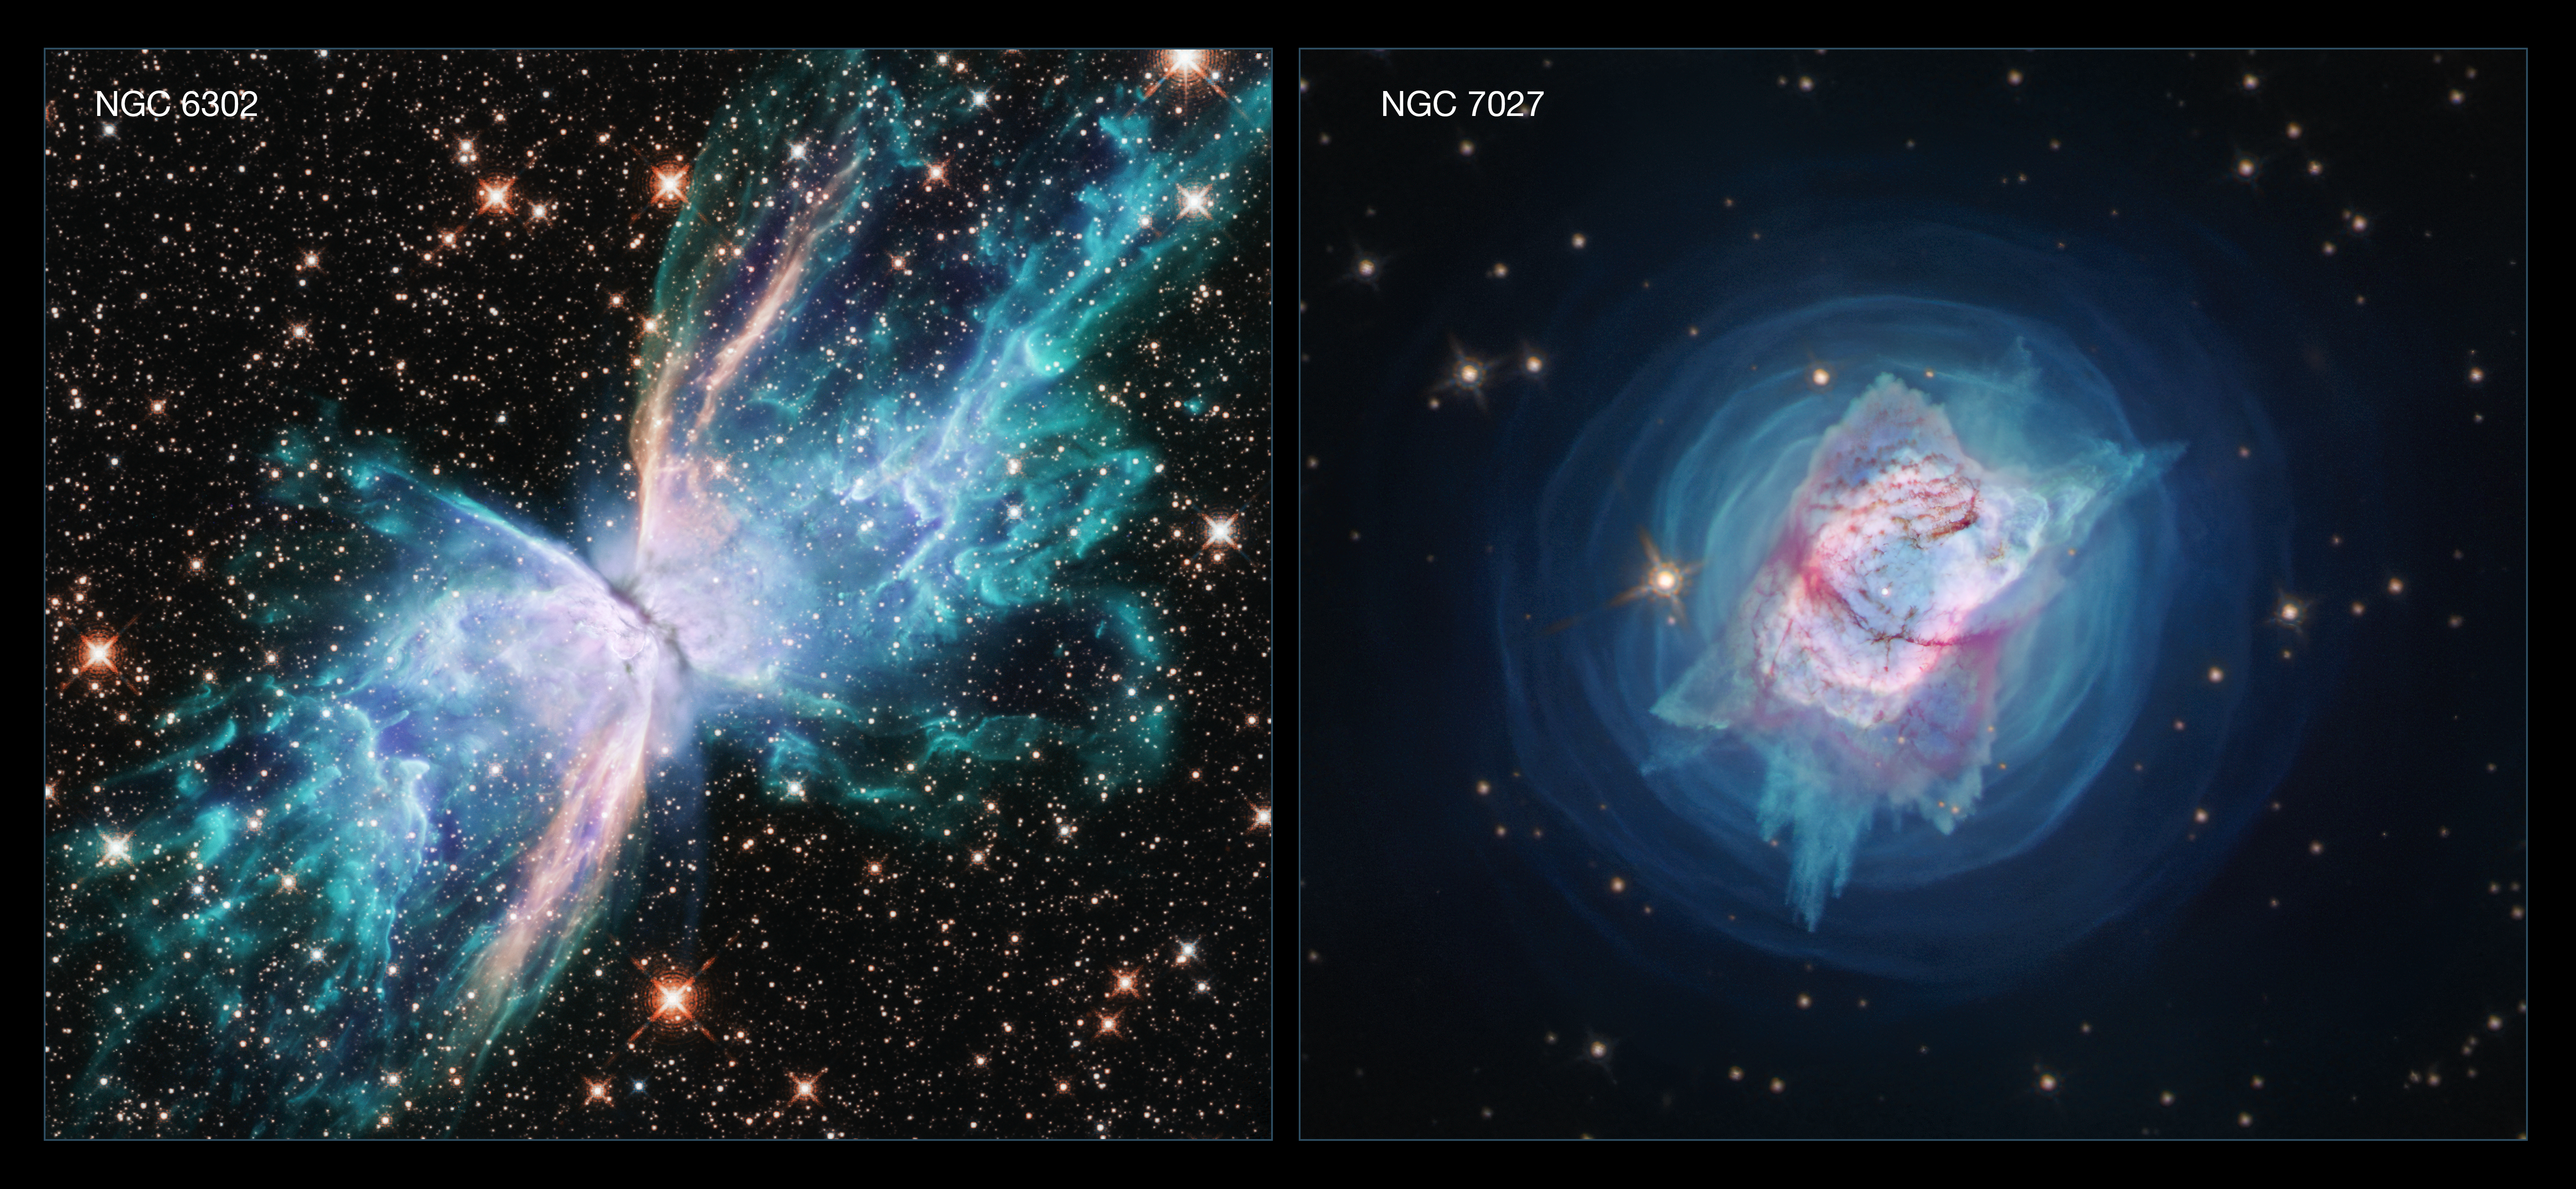

NGC 6302 and NGC 7027

These two new images from the Hubble Space Telescope depict two nearby young planetary nebulae, NGC 6302, dubbed the Butterfly Nebula, and NGC 7027, which resembles a jewel bug. Both are among the dustiest planetary nebulae known and both contain unusually large masses of gas.

Credit: NASA, ESA, and J. Kastner (RIT)